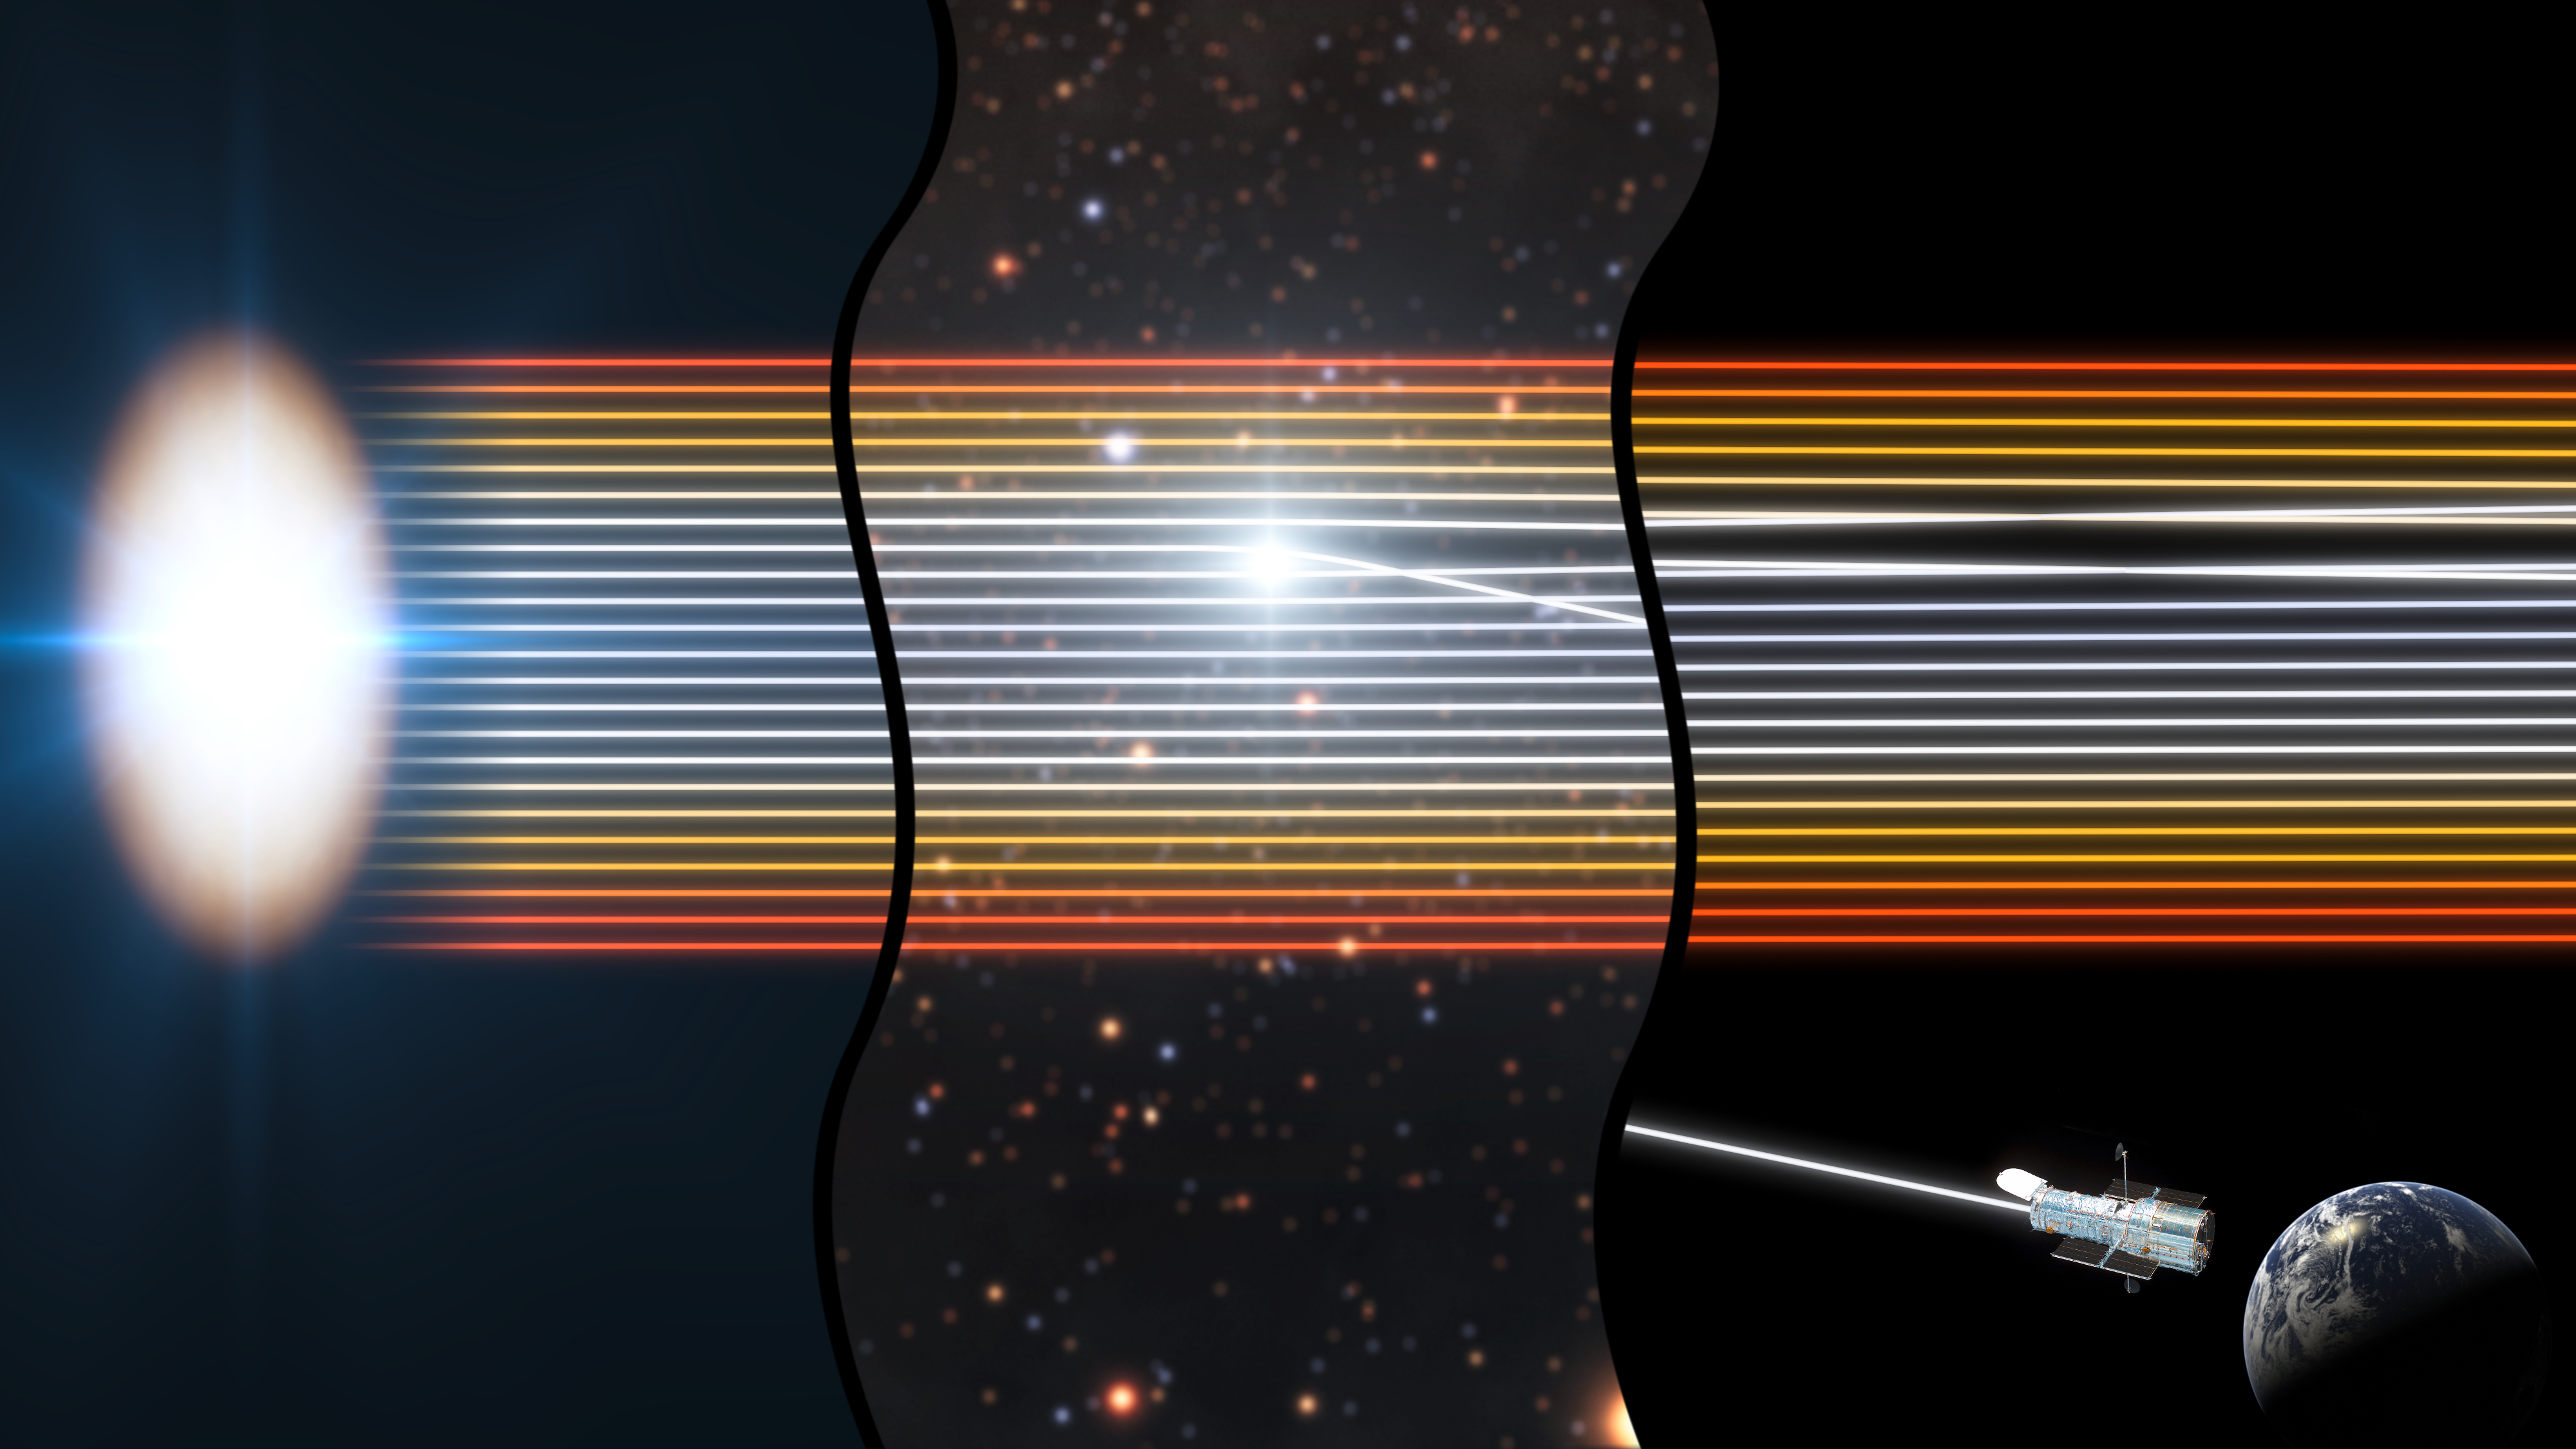

Using gravitational lensing to observe the disc around a black hole

This diagram shows how Hubble is able to observe a quasar, a glowing disc of matter around a distant black hole, even though the black hole would ordinarily be too far away to see clearly.

The diagram shows three different locations: on the left, the quasar accretion disc, which is bluer in the centre and redder around the edges; in the centre, a spot in an intermediate galaxy which the quasar’s light is passing through; and on the right, Hubble’s view in orbit around the Earth.

The gravity from a star in the intermediate galaxy, as it passes through the beams of light from the quasar, deflects the differently coloured beams one-by-one towards Hubble. The colours seen from Hubble therefore change over time as the star effectively scans across the quasar’s disc. This lets astronomers directly observe the colour, temperature and size of the disc with unprecedented precision.

The precision of these observations is equivalent to seeing individual grains of sand on the surface of the Moon.

Credit: NASA & ESA